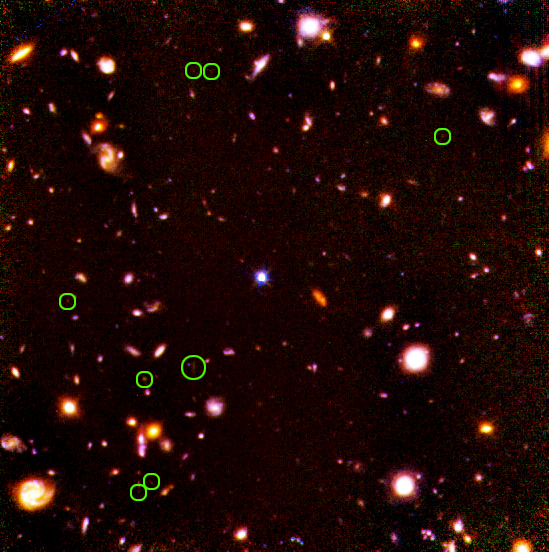

Location of candidate high-redshift galaxies

Location of candidate high-redshift galaxies

Credit: Rodger I. Thompson (University of Arizona) and NASA/ESA